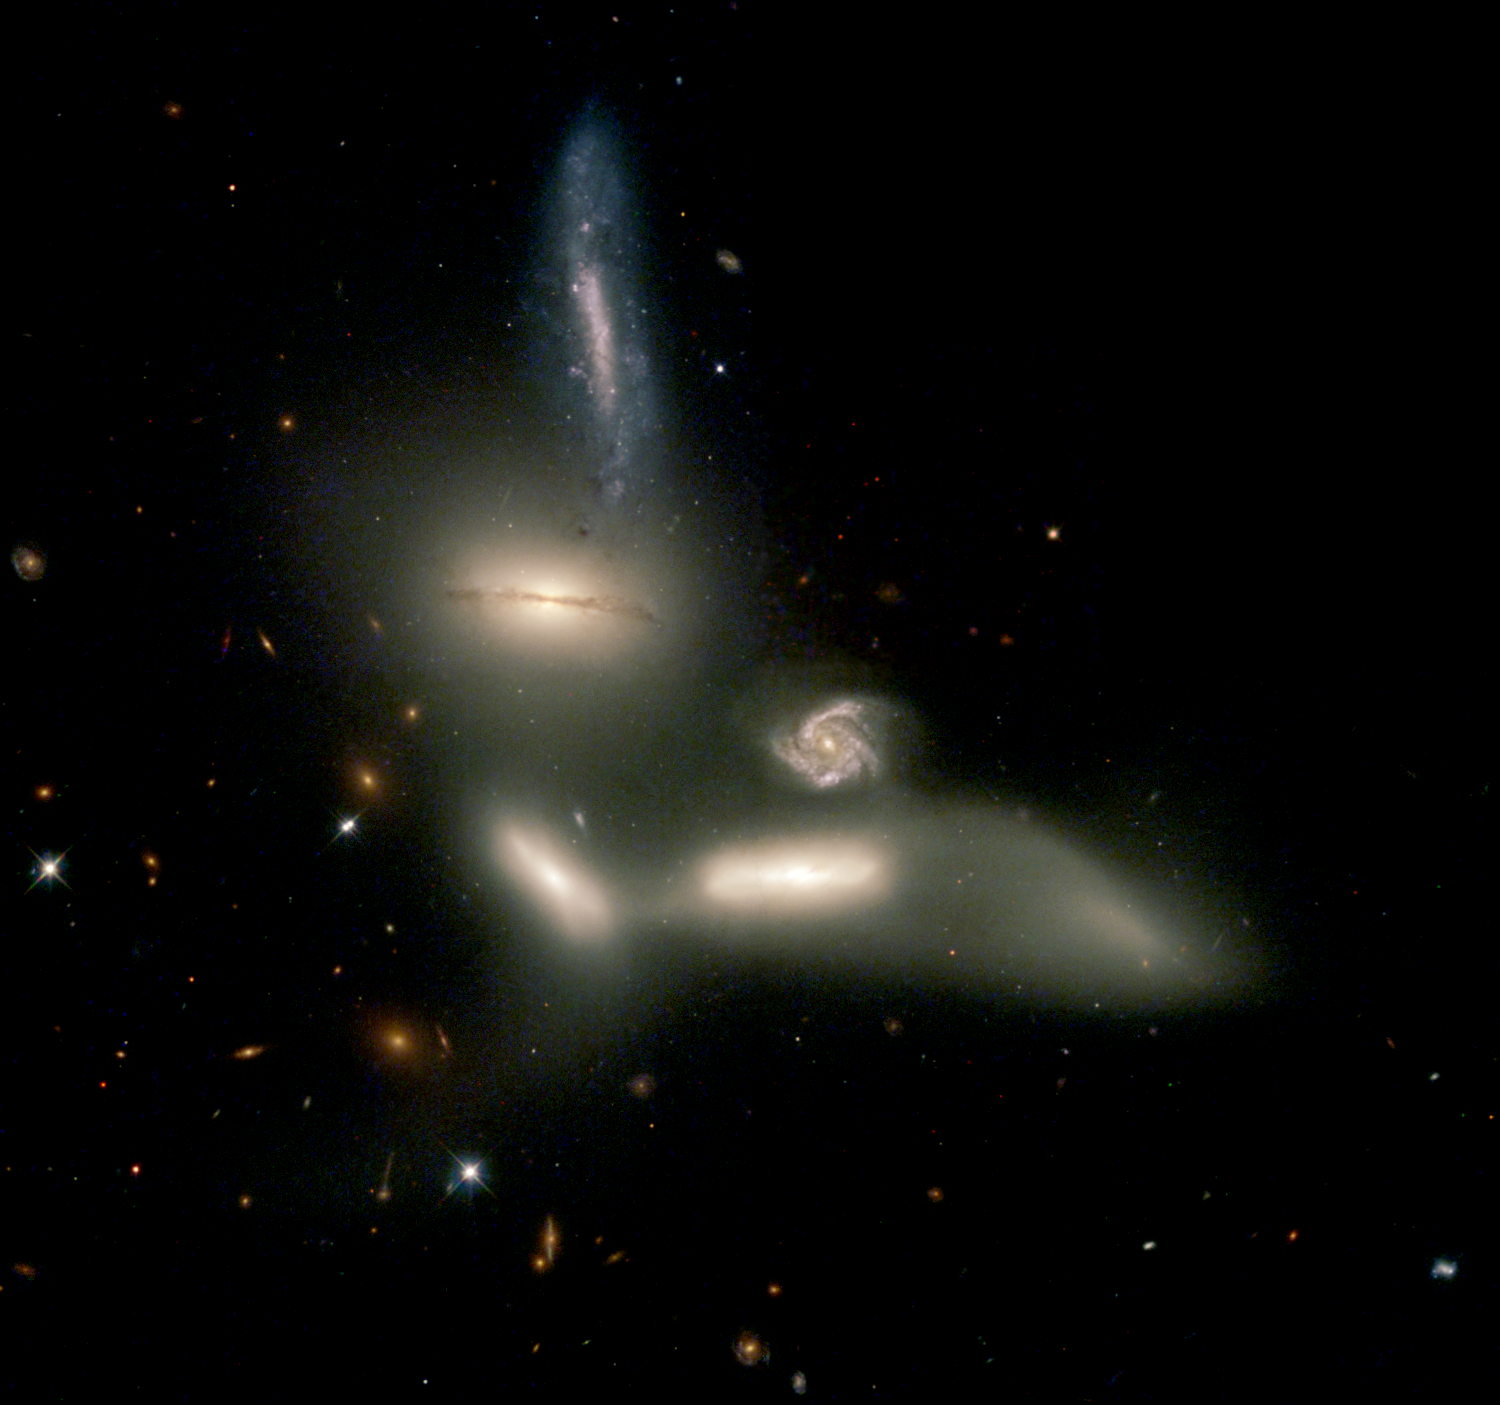

Cosmic dance of destruction

The NASA/ESA Hubble Space Telescope is witnessing a grouping of galaxies engaging in a slow dance of destruction that will last for billions of years. The galaxies are so tightly packed together that gravitational forces are beginning to rip stars from them and distort their shapes. Those same gravitational forces eventually could bring the galaxies together to form one large galaxy.

The name of this grouping, Seyfert's Sextet, implies that six galaxies are participating in the action. But only four galaxies are on the dance card. The small face-on spiral with the prominent arms [center] of gas and stars is a background galaxy almost five times farther away than the other four. Only a chance alignment makes it appear as if it is part of the group. The sixth member of the sextet isn't a galaxy at all but a long 'tidal tail' of stars [below, right] torn from one of the galaxies.

Credit: NASA/ESA, J. English (U. Manitoba), S. Hunsberger, S. Zonak, J. Charlton, S. Gallagher (PSU), and L. Frattare (STScI)